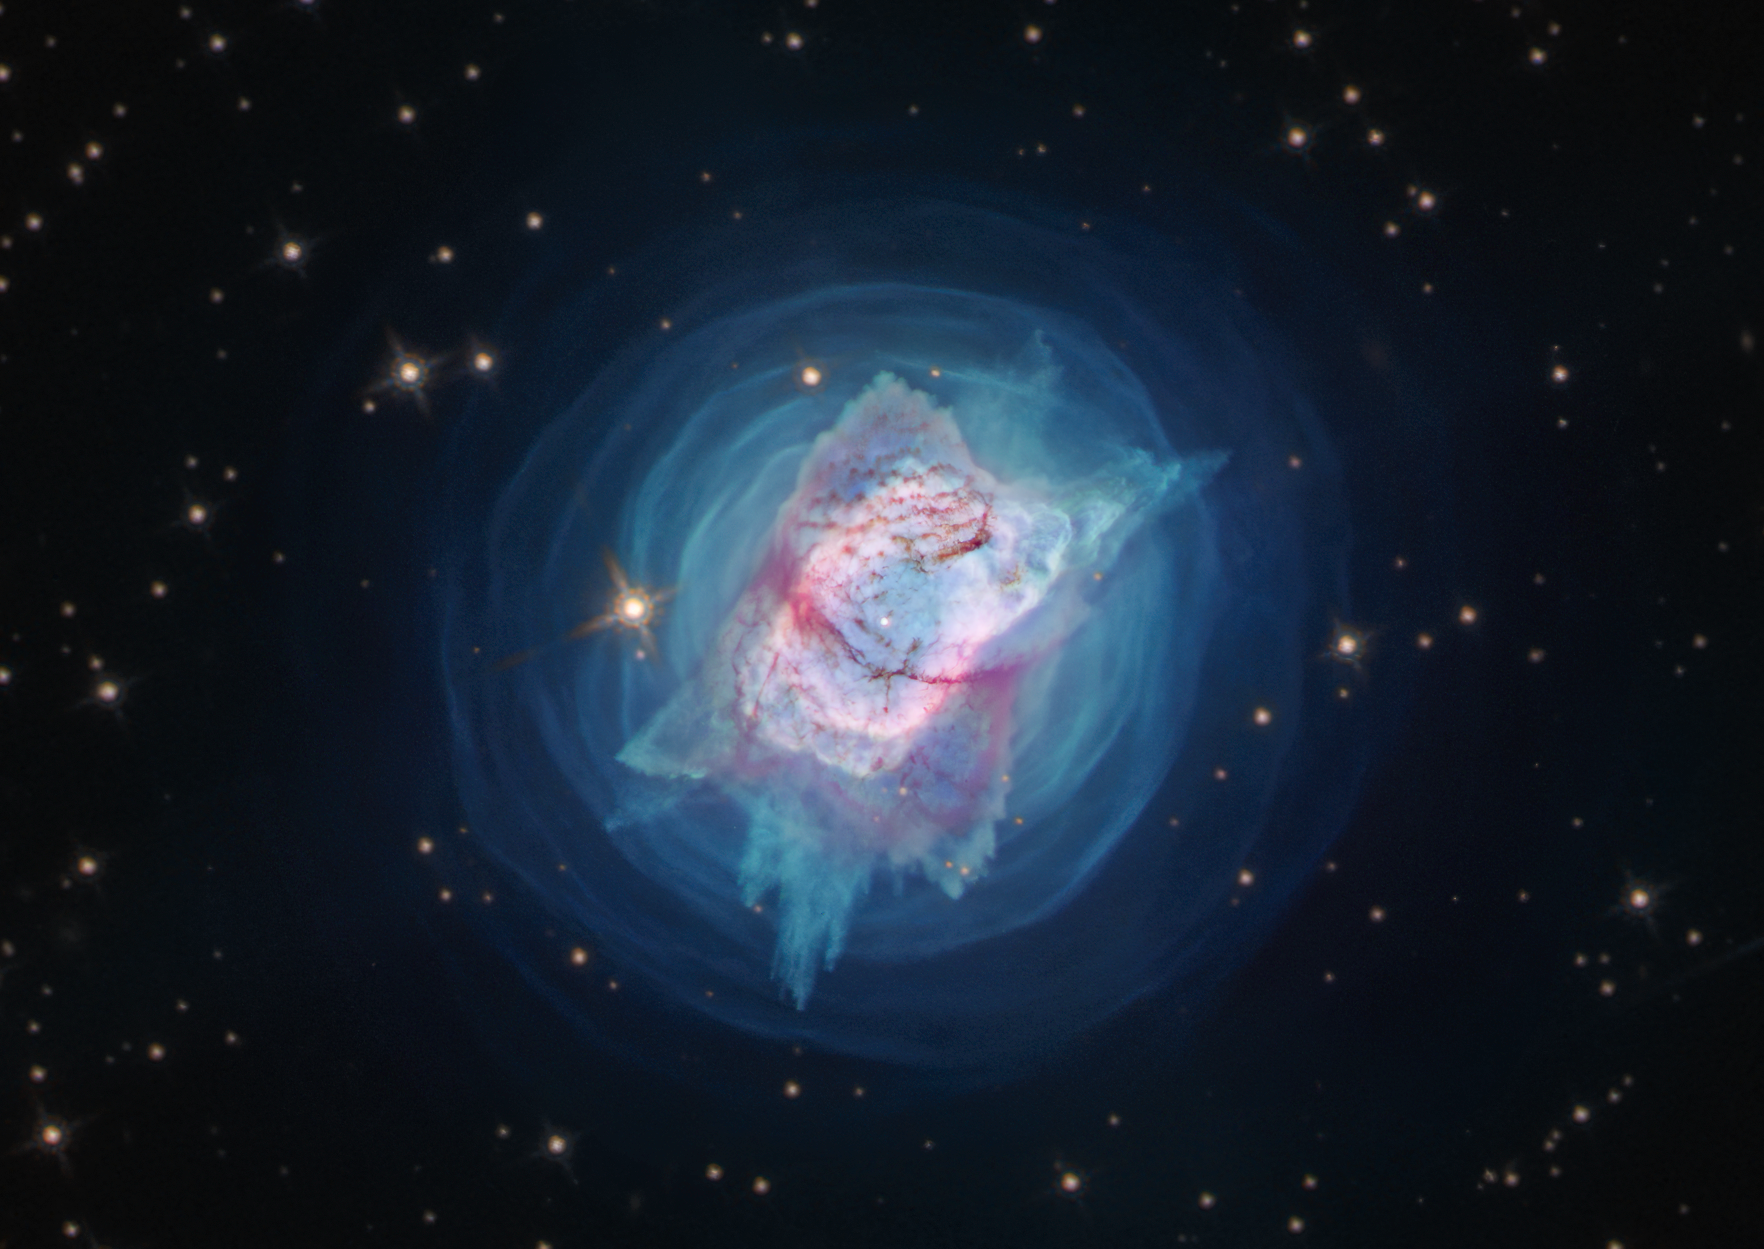

NGC 7027

This image from the NASA/ESA Hubble Space Telescope depicts NGC 7027, or the “Jewel Bug” nebula.

The object had been slowly puffing away its mass in quiet, spherically symmetric or perhaps spiral patterns for centuries — until relatively recently when it produced a new cloverleaf pattern.

New observations of the object have found unprecedented levels of complexity and rapid changes in the jets and gas bubbles blasting off of the star at the centre of the nebula.

Credit: NASA, ESA, and J. Kastner (RIT)